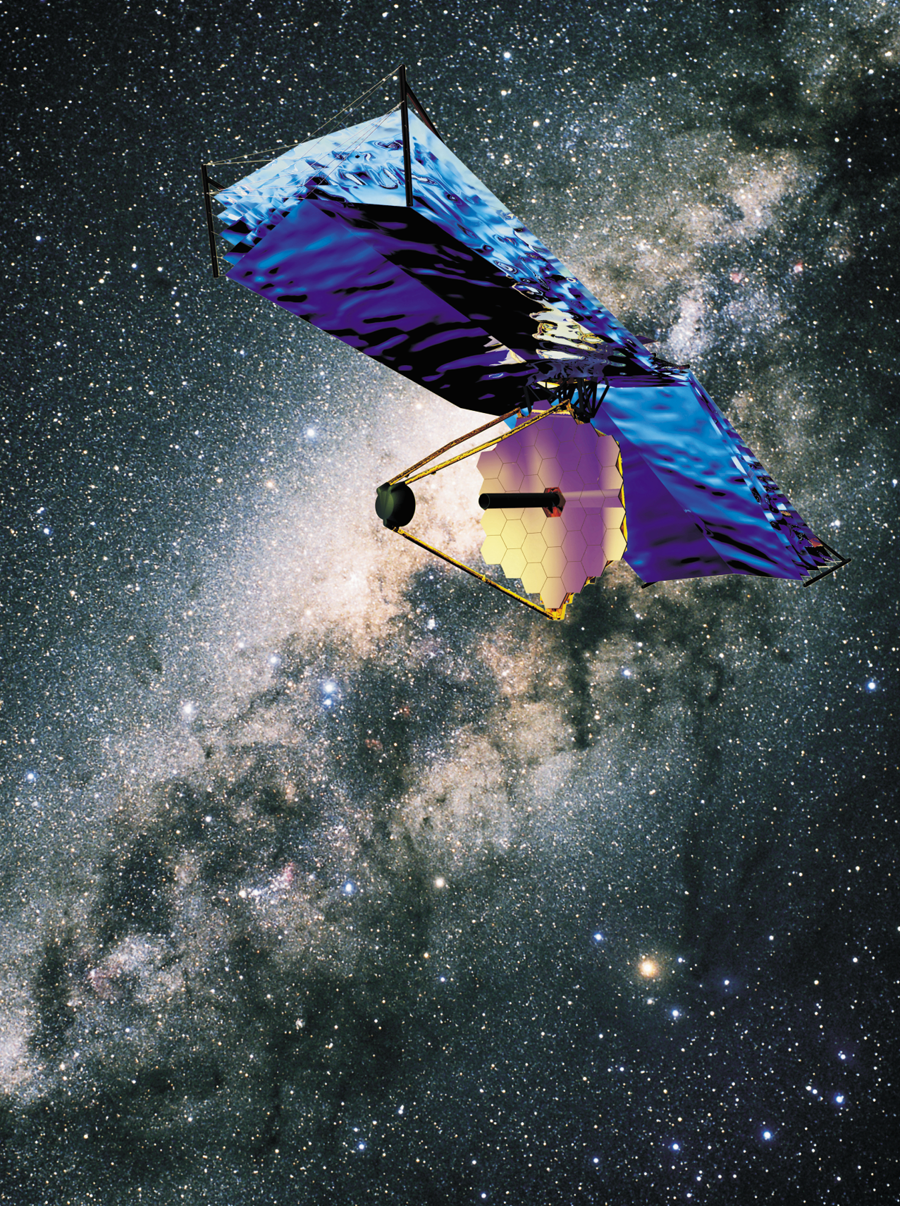

The James Webb Space Telescope (artist's impression)

The James Webb Space Telescope transits in front of the Milky Way.

Credit: ESA